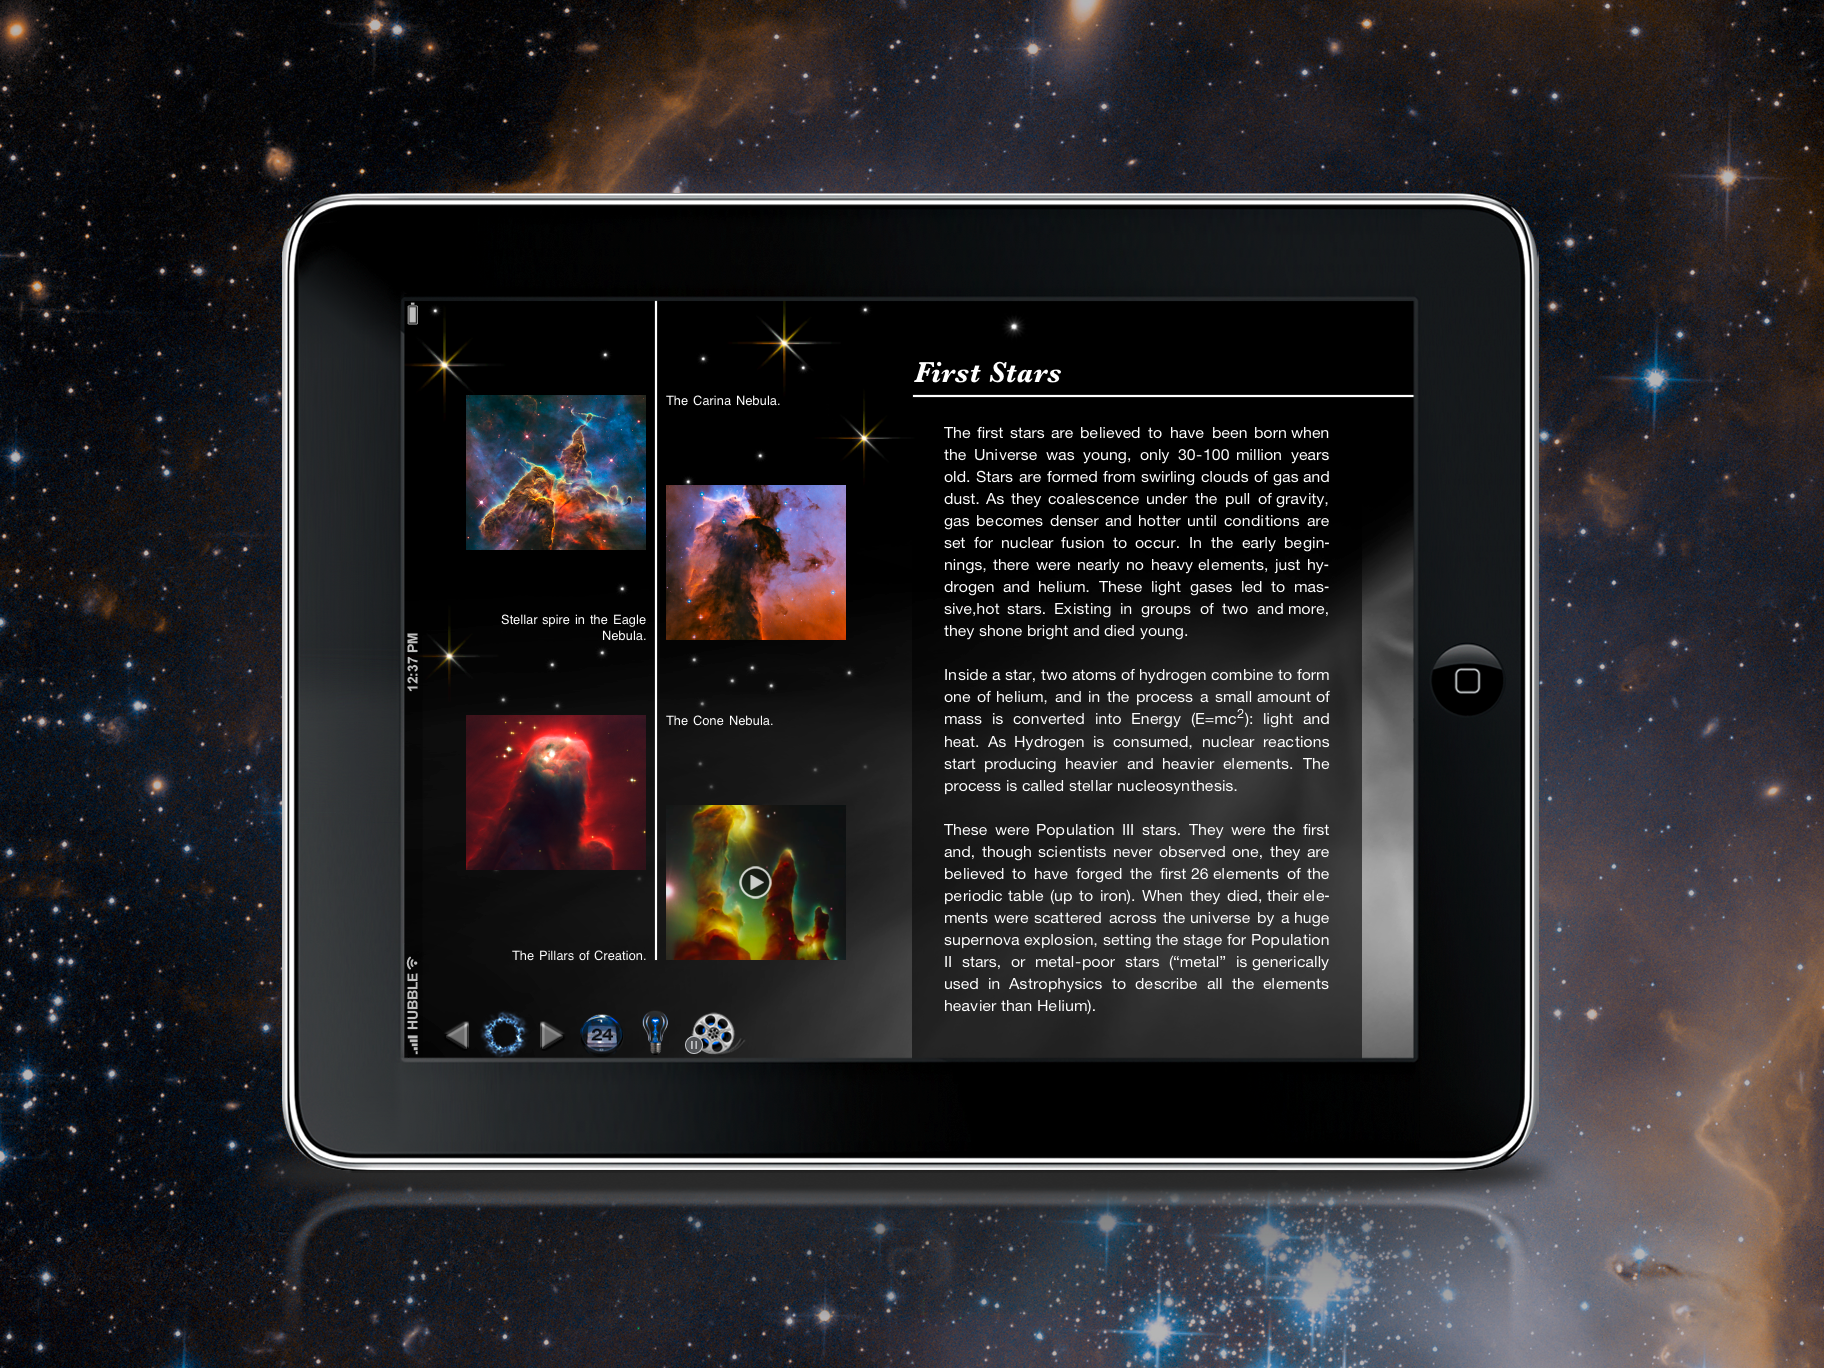

Screenshot of the Back in Time iPad app

The Back in Time app is an animated history e-book that guides the reader through time from the first moments of the Universe’s history until the most recent events. The New York Times has included the Back in Time app, developed by the company Landka among its Top10 iPad apps in 2011. ESA/Hubble went into partnership with Landka to deliver content for this educational app, contributing images and animations for the first four chapters: The Big Bang, The First Stars, The Milky Way and The Solar System.

You can buy the app in the Apple App Store.

Credit: ESO/Landka